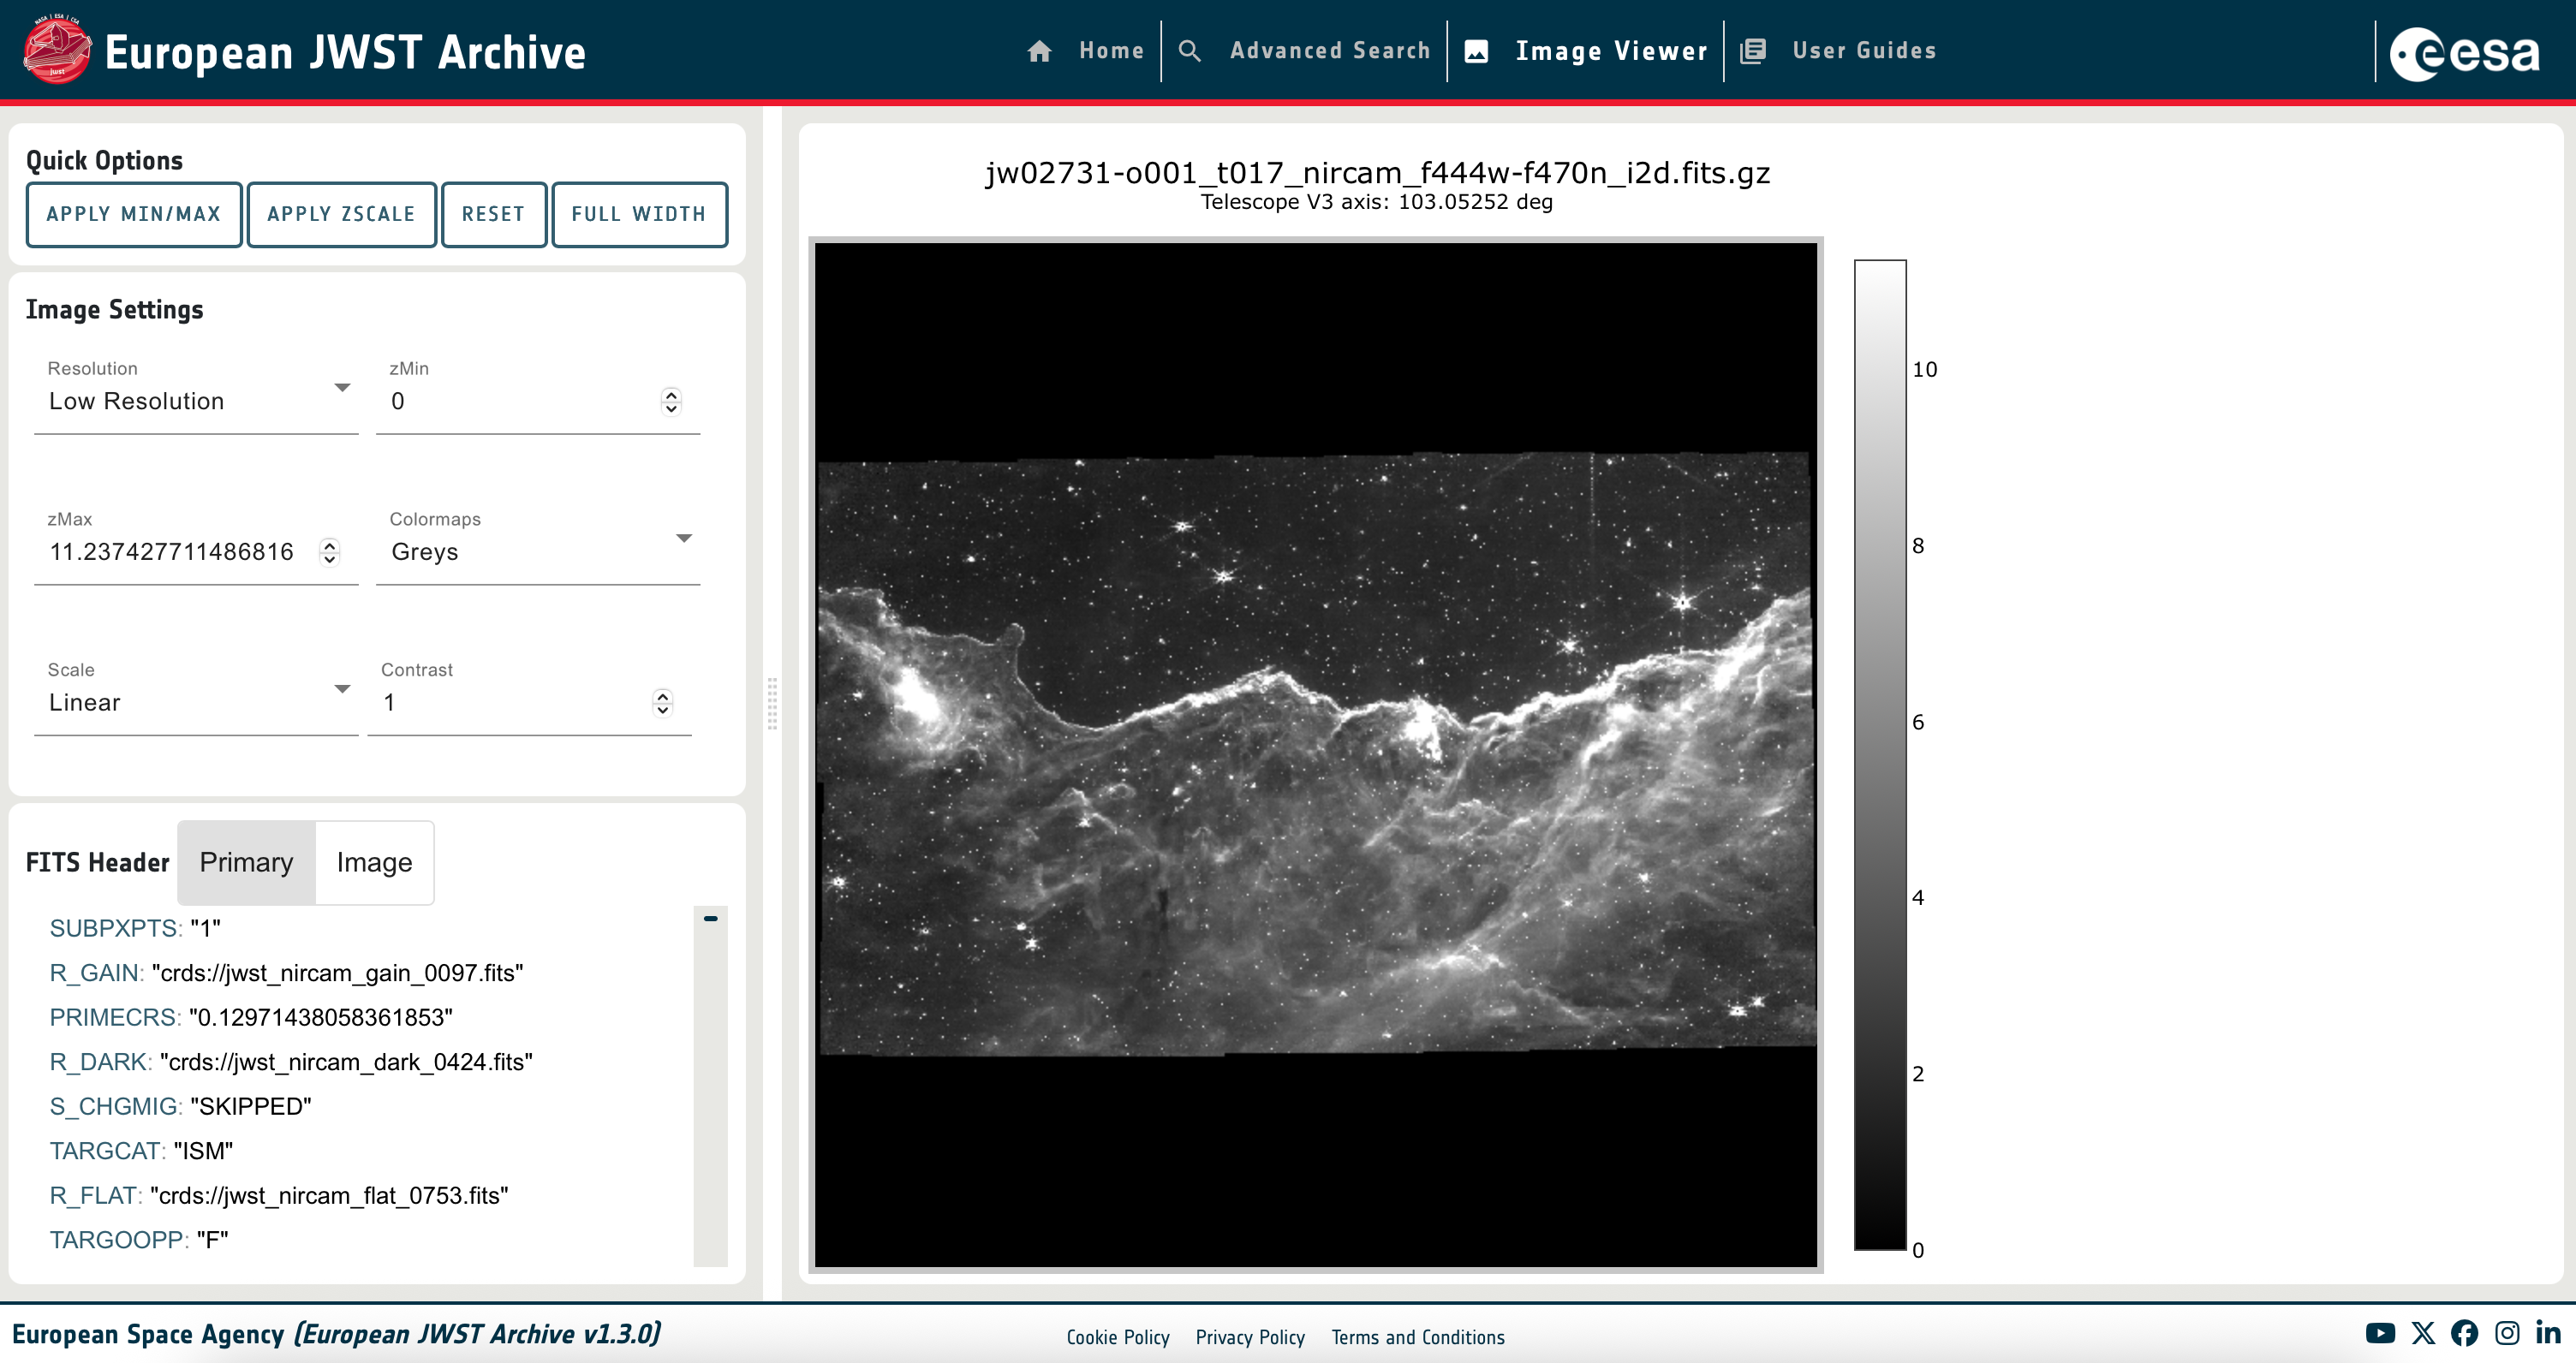

eJWST Interactive image viewer

This image shows the new eJWST interactive image viewer.

Credit: eJWST